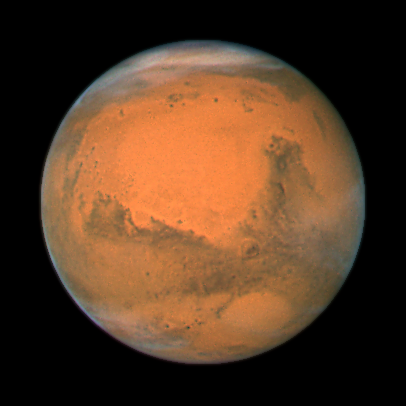

Mars: closest approach 2007

The NASA/ESA Hubble Space Telescope took this close-up of the red planet Mars when it was just 88 million kilometers away. This colour image was assembled from a series of exposures taken within 36 hours of the Mars closest approach with Hubble's Wide Field and Planetary Camera 2. Mars will be closest to Earth on December 18, at 11:45 p.m. Universal Time.

Credit: NASA, ESA, the Hubble Heritage Team (STScI/AURA), J. Bell (Cornell University), and M. Wolff (Space Science Institute, Boulder)